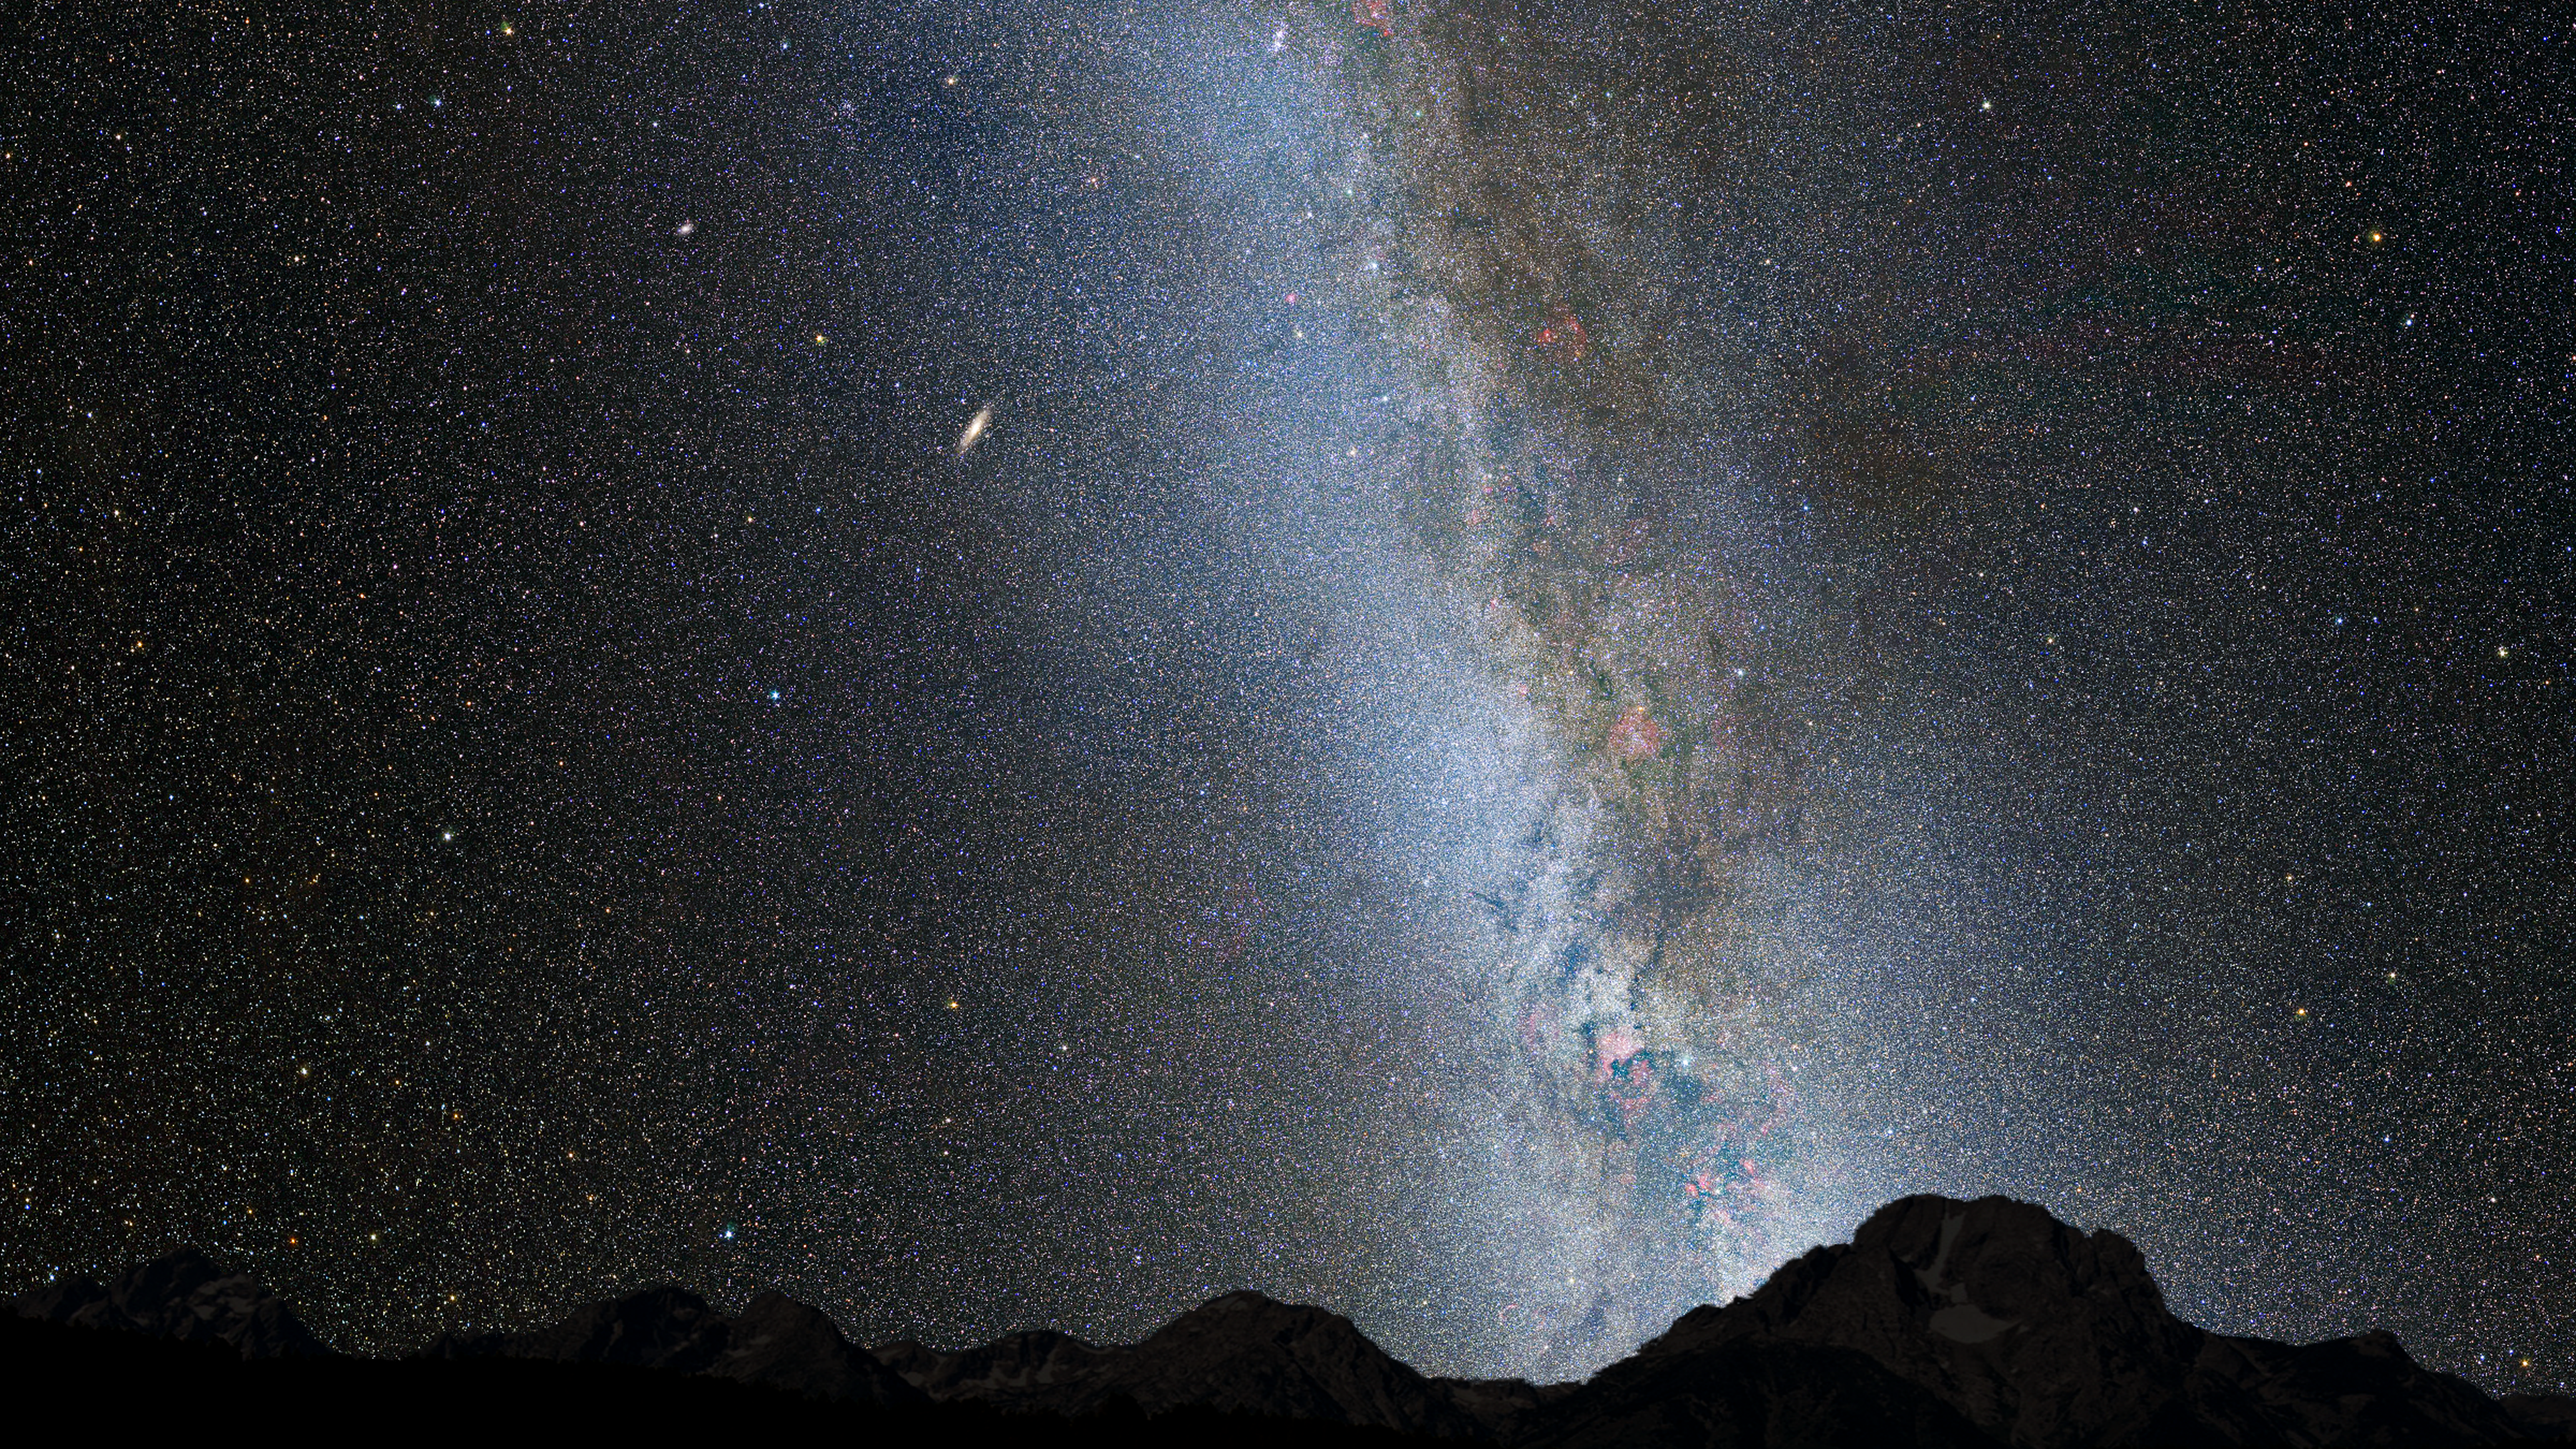

Nighttime Sky View of Future Galaxy Merger: Present Day

This is a nighttime view of the current sky, with the bright belt of our Milky Way. The Andromeda galaxy lies 2.5 million light-years away and looks like a faint spindle, several times the diameter of the full Moon.

Credit: NASA, ESA, Z. Levay and R. van der Marel (STScI), T. Hallas, and A. Mellinger